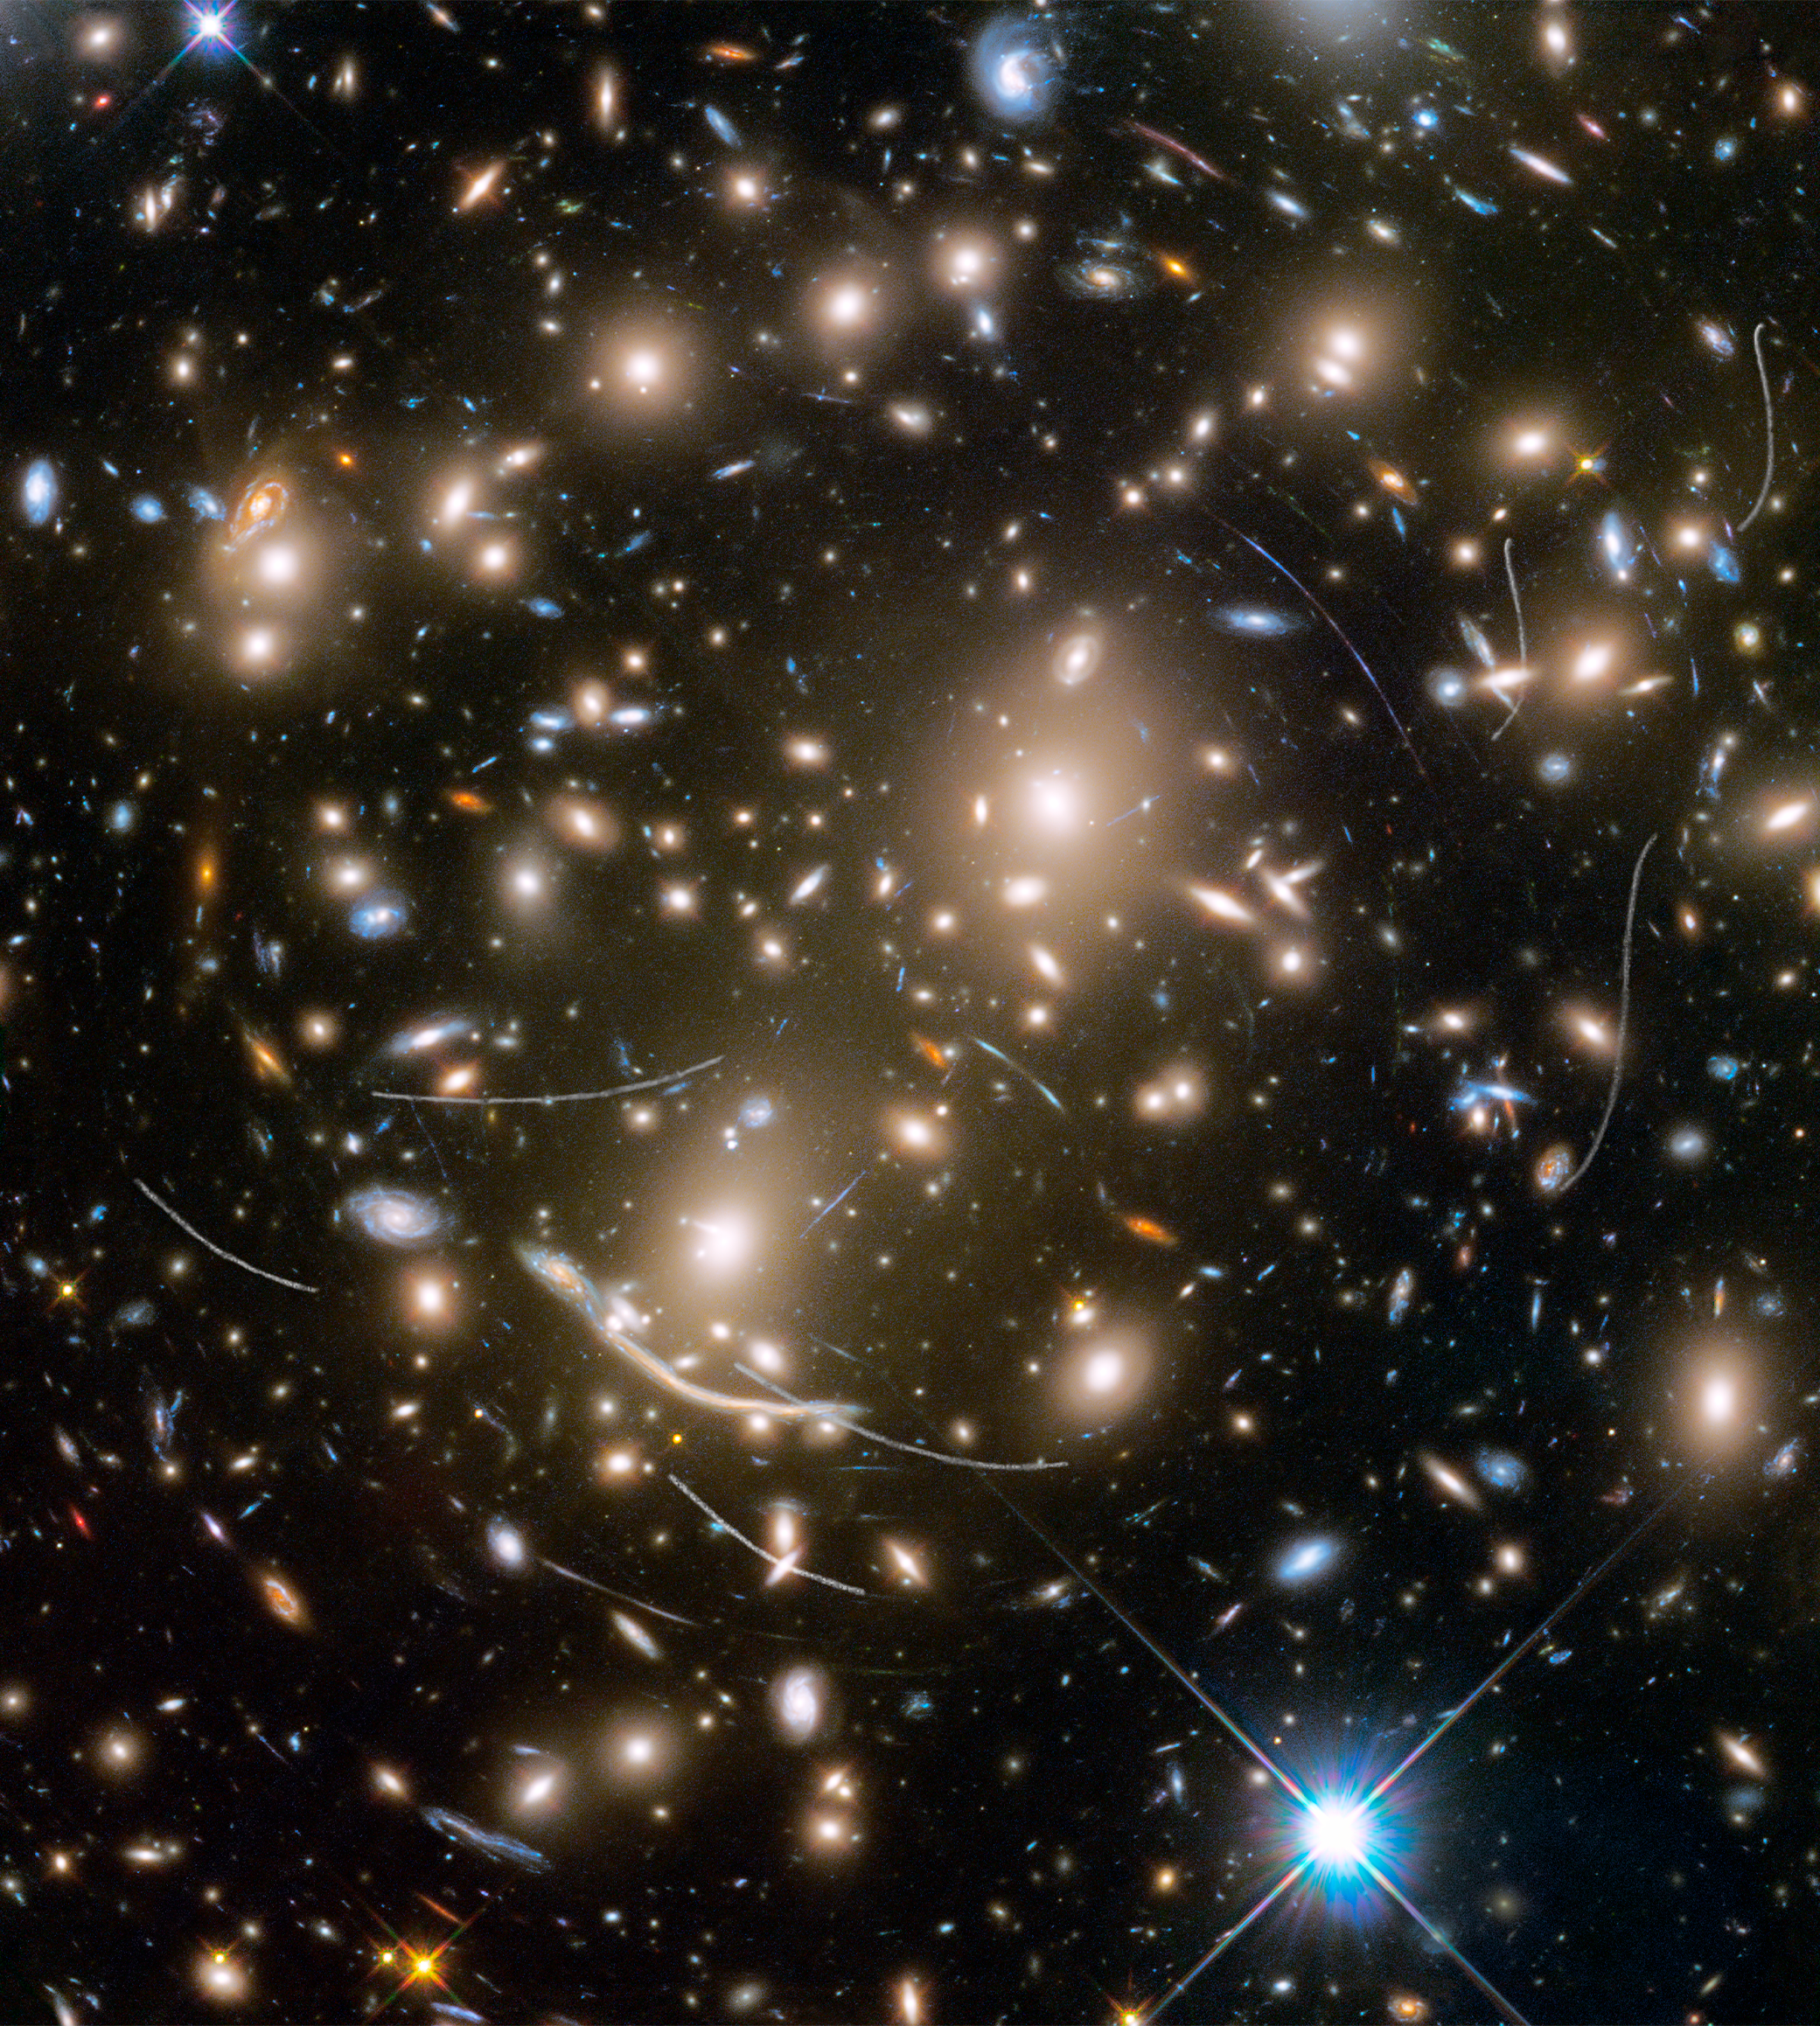

Asteroids in Hubble Frontier Field Abell 370

As if this Hubble Space Telescope picture isn't cluttered enough with myriad galaxies, nearby asteroids photobomb the image, their trails sometimes mimicking background astronomical phenomena.

The stunningly beautiful galaxy cluster Abell 370 contains an astounding assortment of several hundred galaxies tied together by the mutual pull of gravity. Located approximately 4 billion light-years away in the constellation Cetus, the Sea Monster, this immense cluster is a rich mix of a variety of galaxy shapes.

Entangled among the galaxies are thin, white trails that look like curved or S-shaped streaks. These are trails from asteroids that reside, on average, only about 260 million kilometres from Earth — right around the corner in astronomical terms. The trails appear in multiple Hubble exposures that have been combined into one image. Of the 22 total asteroid sightings for this field, five are unique objects. These asteroids are so faint that they were not previously identified.

The asteroid trails look curved due to an observational effect called parallax. As Hubble orbits around Earth, an asteroid will appear to move along an arc with respect to the vastly more distant background stars and galaxies. The motion of Earth around the Sun, and the motion of the asteroids along their orbits, are other contributing factors to the apparent skewing of asteroid paths.

All the asteroids were found manually, the majority by "blinking" consecutive exposures to capture apparent asteroid motion. Astronomers found a unique asteroid for every 10 to 20 hours of exposure time.

These asteroid trails should not be confused with the mysterious-looking arcs of blue light that are actually distorted images of distant galaxies behind the cluster. Many of these far-flung galaxies are too faint for Hubble to see directly. Instead, in a dramatic example of "gravitational lensing," the cluster functions as a natural telescope, warping space and affecting light traveling through the cluster toward Earth.

The Frontier Fields program is a collaboration among several space telescopes and ground-based observatories to study six massive galaxy clusters and their effects. Using a different camera, pointing in a slightly different direction, Hubble photographed six so-called "parallel fields" at the same time it photographed the massive galaxy clusters. This maximised Hubble's observational efficiency in doing deep space exposures. These parallel fields are similar in depth to the famous Hubble Deep Field, and include galaxies about four-billion times fainter than can be seen by the human eye.

This image was assembled from several exposures taken in visible and infrared light. The field's position on the sky is near the ecliptic, the plane of our Solar System. This is the zone in which most asteroids reside, which is why Hubble astronomers saw so many crossings. Hubble deep-sky observations taken along a line-of-sight near the plane of our Solar System commonly record asteroid trails.

Credit: NASA, ESA, and B. Sunnquist and J. Mack (STScI) Acknowledgment: NASA, ESA, and J. Lotz (STScI) and the HFF Team